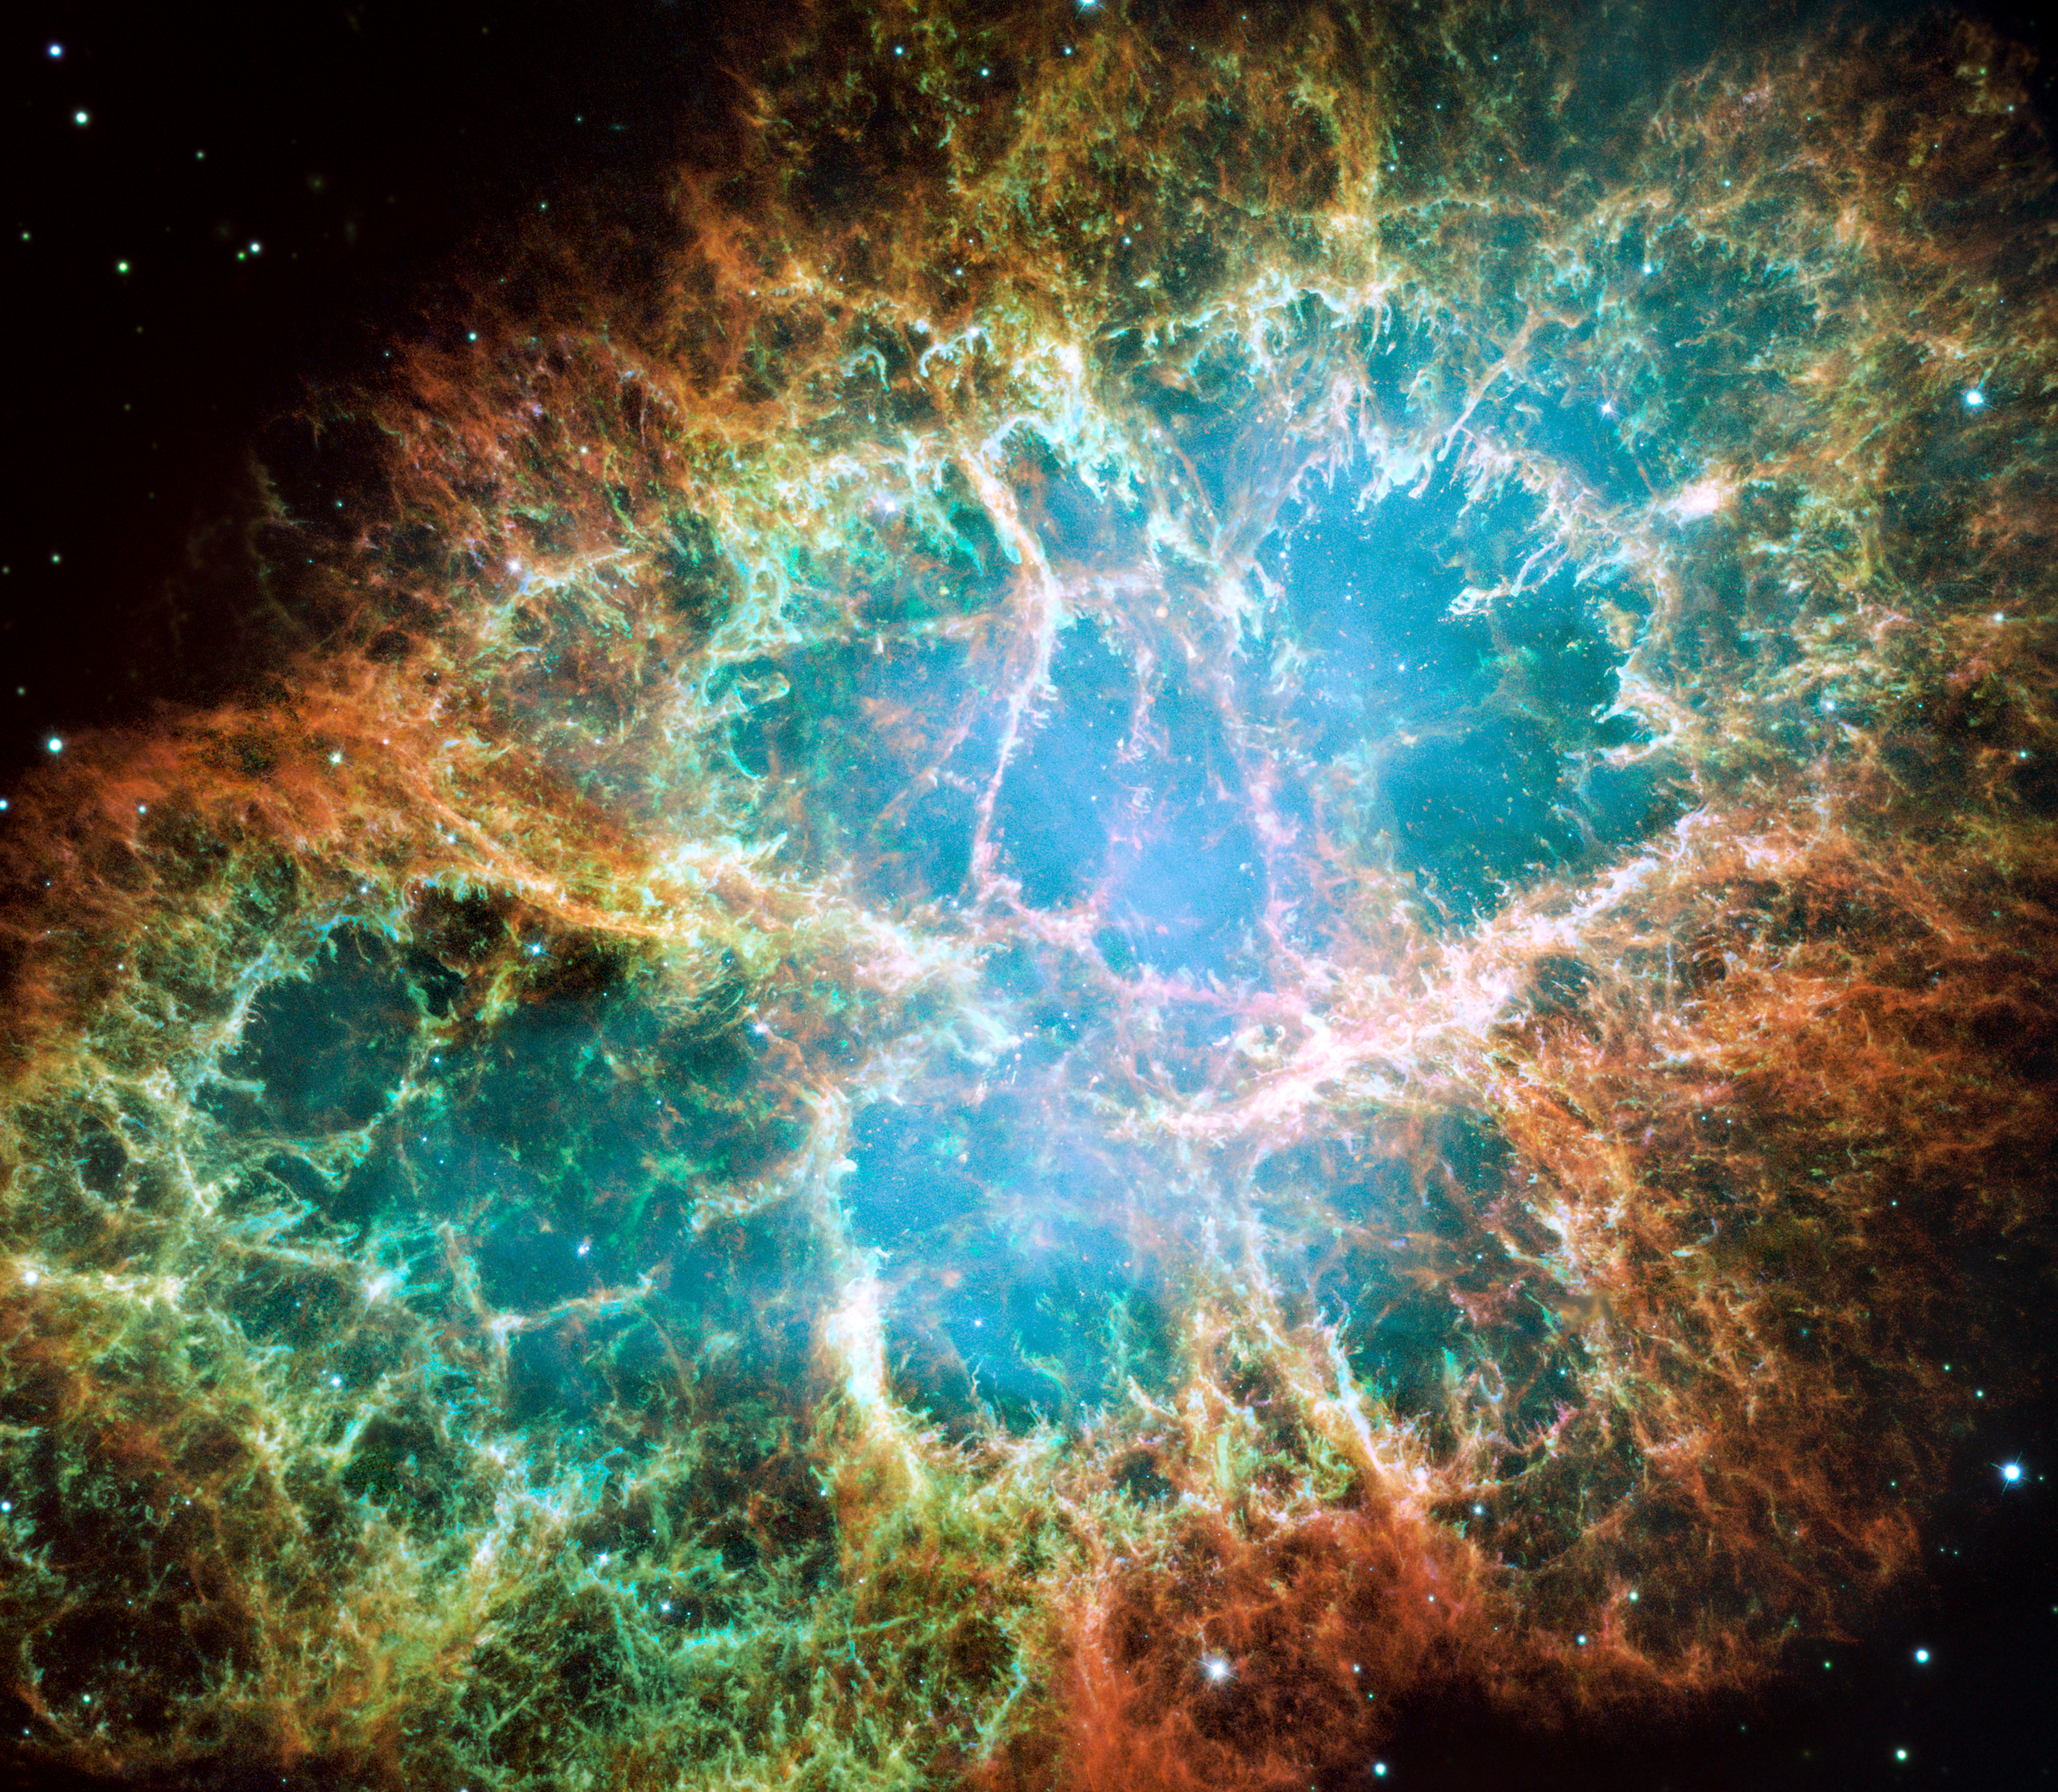

Hubble’s view of the Crab Nebula (2005 image)

This is a 2005 optical image from the NASA/ESA Hubble Space Telescope of the Crab Nebula.

Credit: NASA, ESA, A. Loll/J. Hester (Arizona State University)